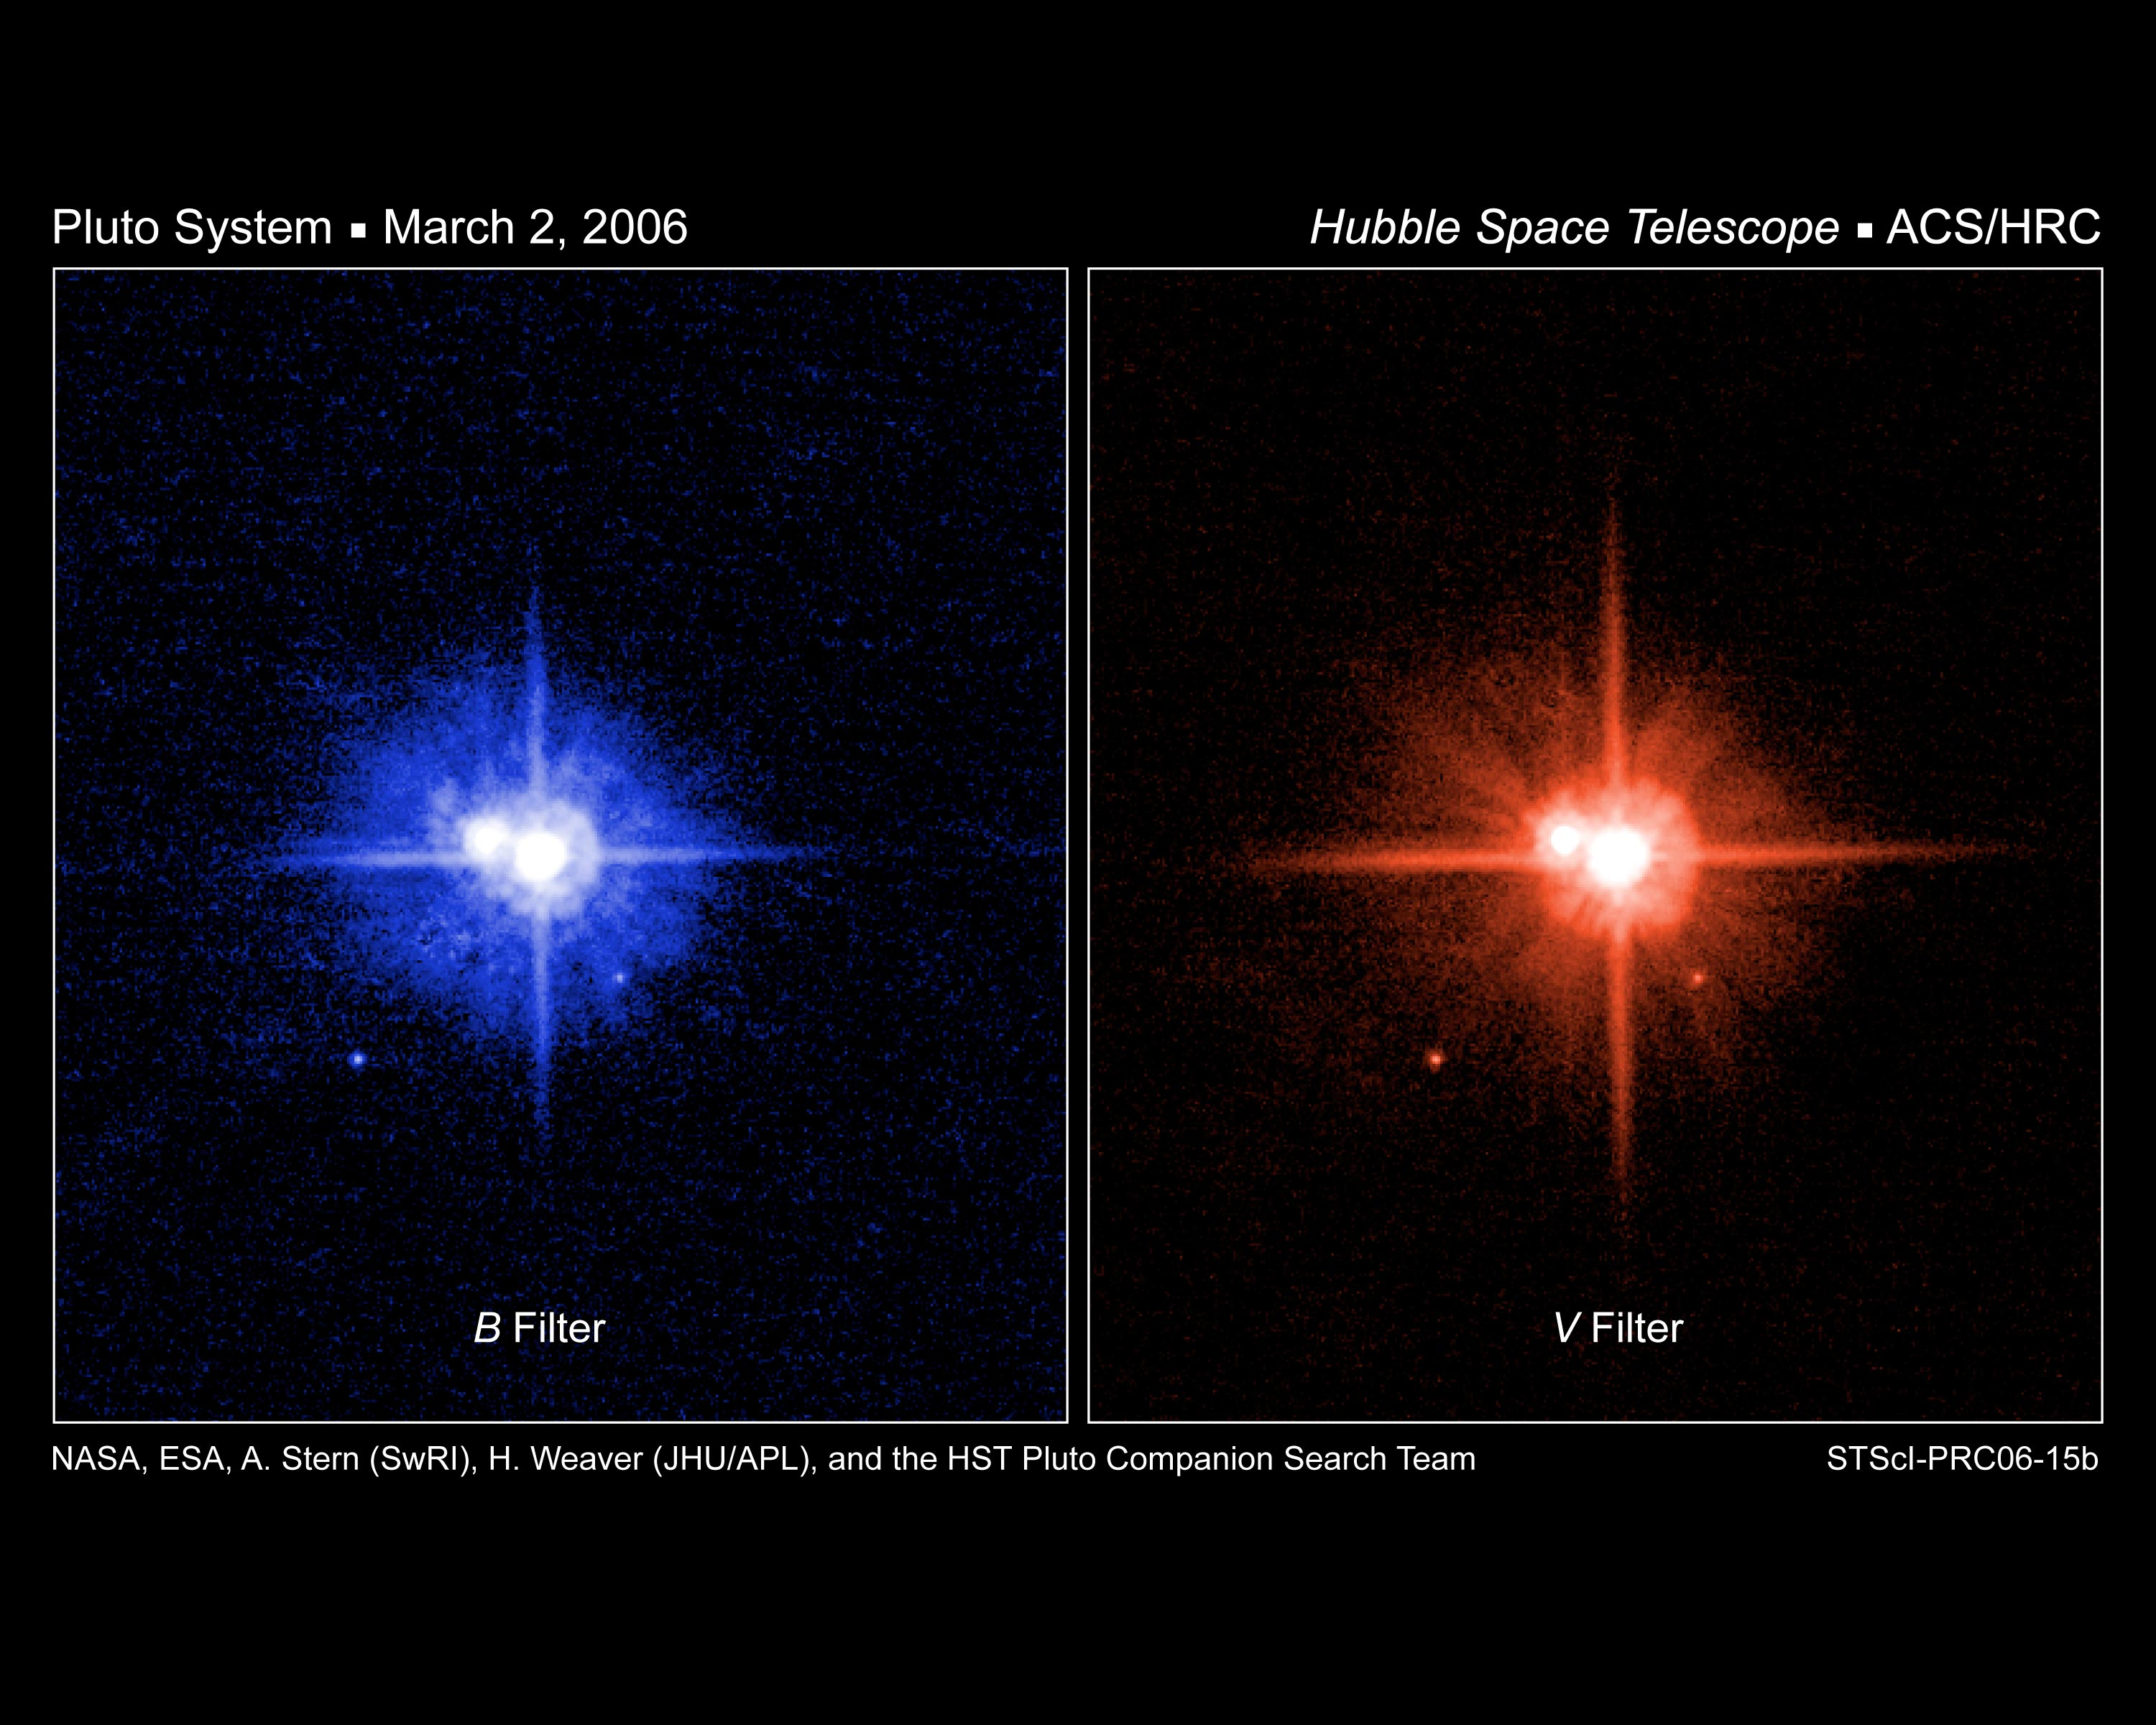

Hubble colour images of Pluto's moons support a common birth

These NASA/ESA Hubble Space Telescope images of Pluto were taken on March 2, 2006, using the High Resolution Channel (HRC) of the Advanced Camera for Surveys (ACS). The image on the left was taken through a blue filter (F435W), and the one on the right was taken through a red filter (F606W). By comparing these two images in detail, astronomers discovered that the surfaces of Pluto's two newly-discovered satellites (S/2005 P 1 and S/2005 P 2, or P1 and P2 for short) have essentially the same colour as Charon's surface.

Credit: NASA, ESA, H. Weaver (Johns Hopkins University/Applied Physics Lab), A. Stern (Southwest Research Institute), and the HST Pluto Companion Search Team